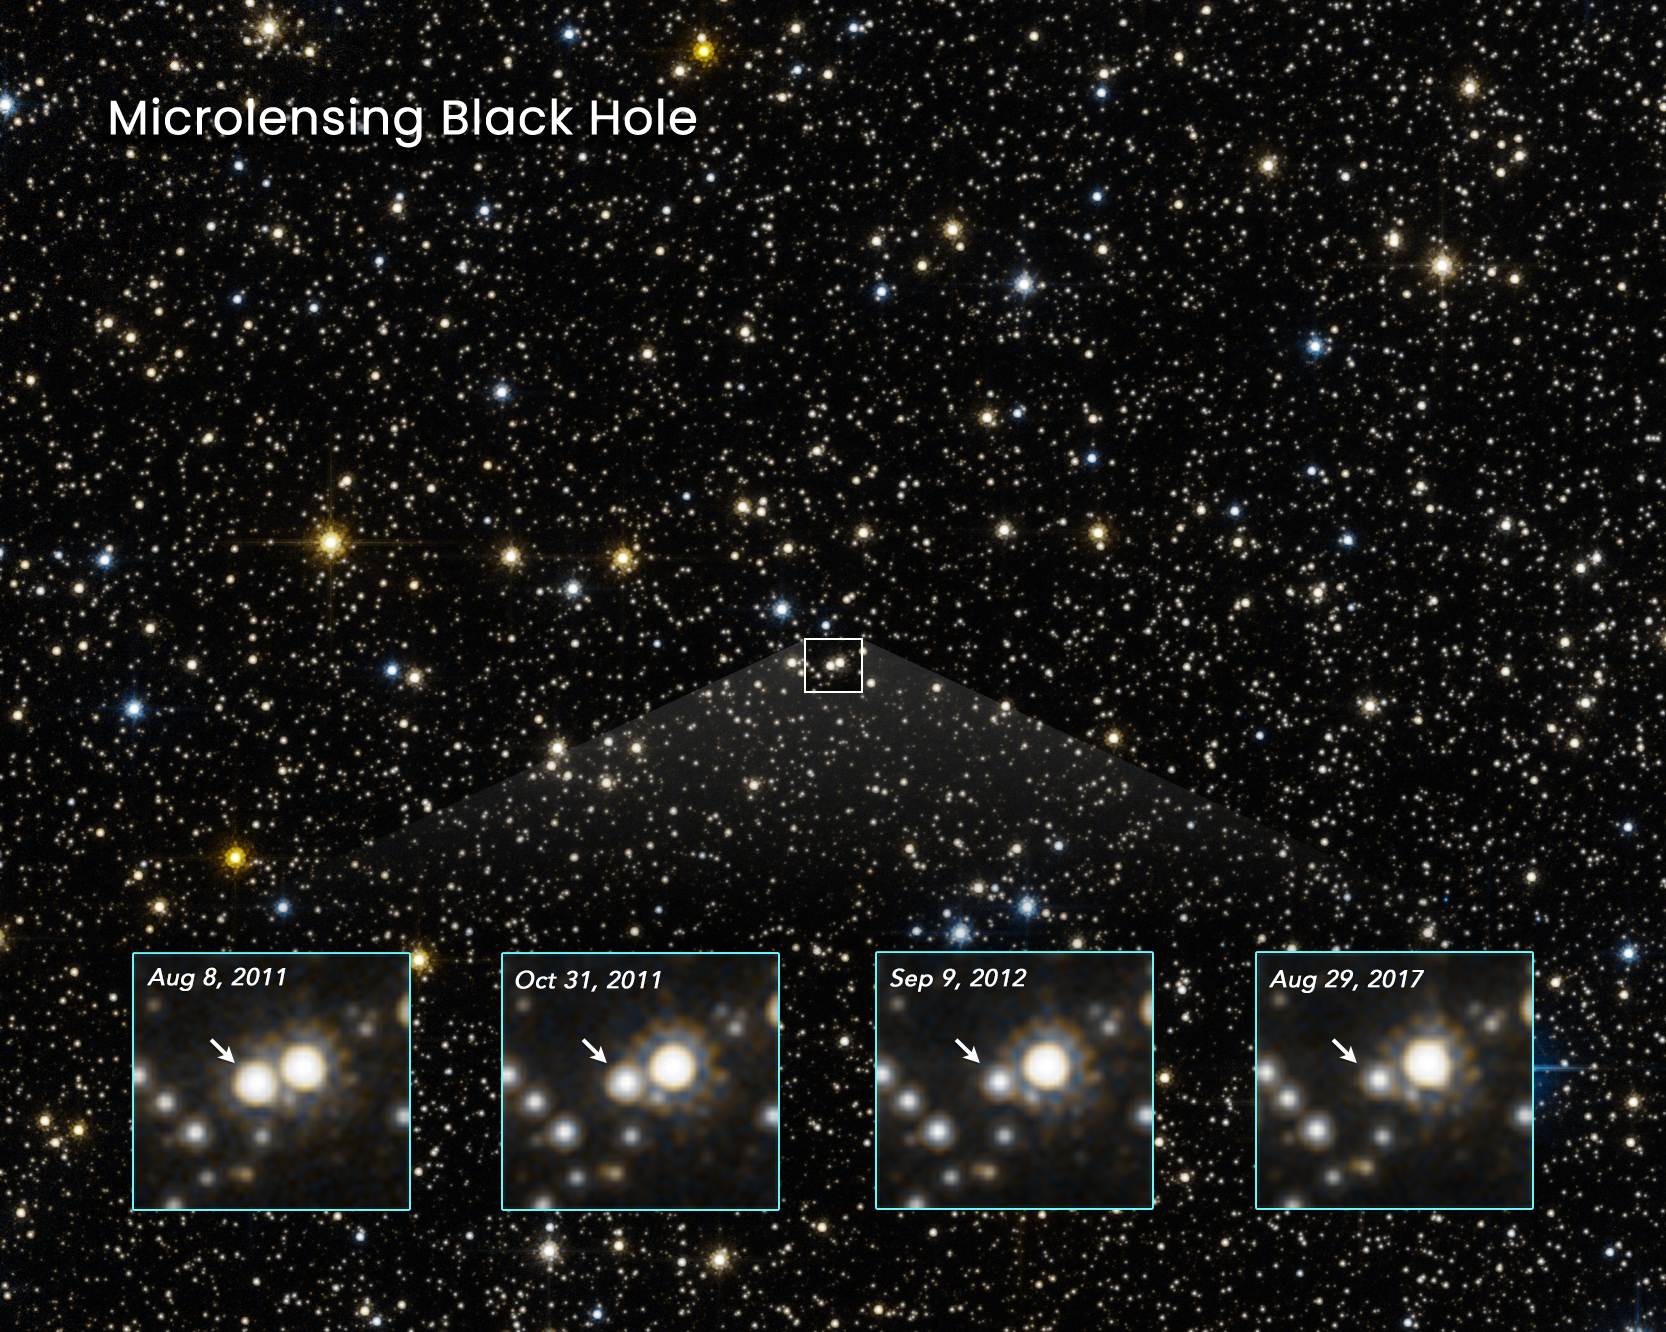

Microlensing Black Hole

The star-filled sky in this NASA/ESA Hubble Space Telescope photo lies in the direction of the Galactic centre. The light from stars is monitored to see if any change in their apparent brightness is caused by a foreground object drifting in front of them. The warping of space by the interloper would momentarily brighten the appearance of a background star, an effect called gravitational lensing. One such event is shown in the four close-up frames at the bottom. The arrow points to a star that momentarily brightened, as first captured by Hubble in August 2011. This was caused by a foreground black hole drifting in front of the star, along our line of sight. The star brightened and then subsequently faded back to its normal brightness as the black hole passed by. Because a black hole doesn't emit or reflect light, it cannot be directly observed. But its unique thumbprint on the fabric of space can be measured through these so-called microlensing events. Though an estimated 100 million isolated black holes roam our galaxy, finding the telltale signature of one is a needle-in-a-haystack search for Hubble astronomers.

Credit: NASA, ESA, K. Sahu (STScI), J. DePasquale (STScI)